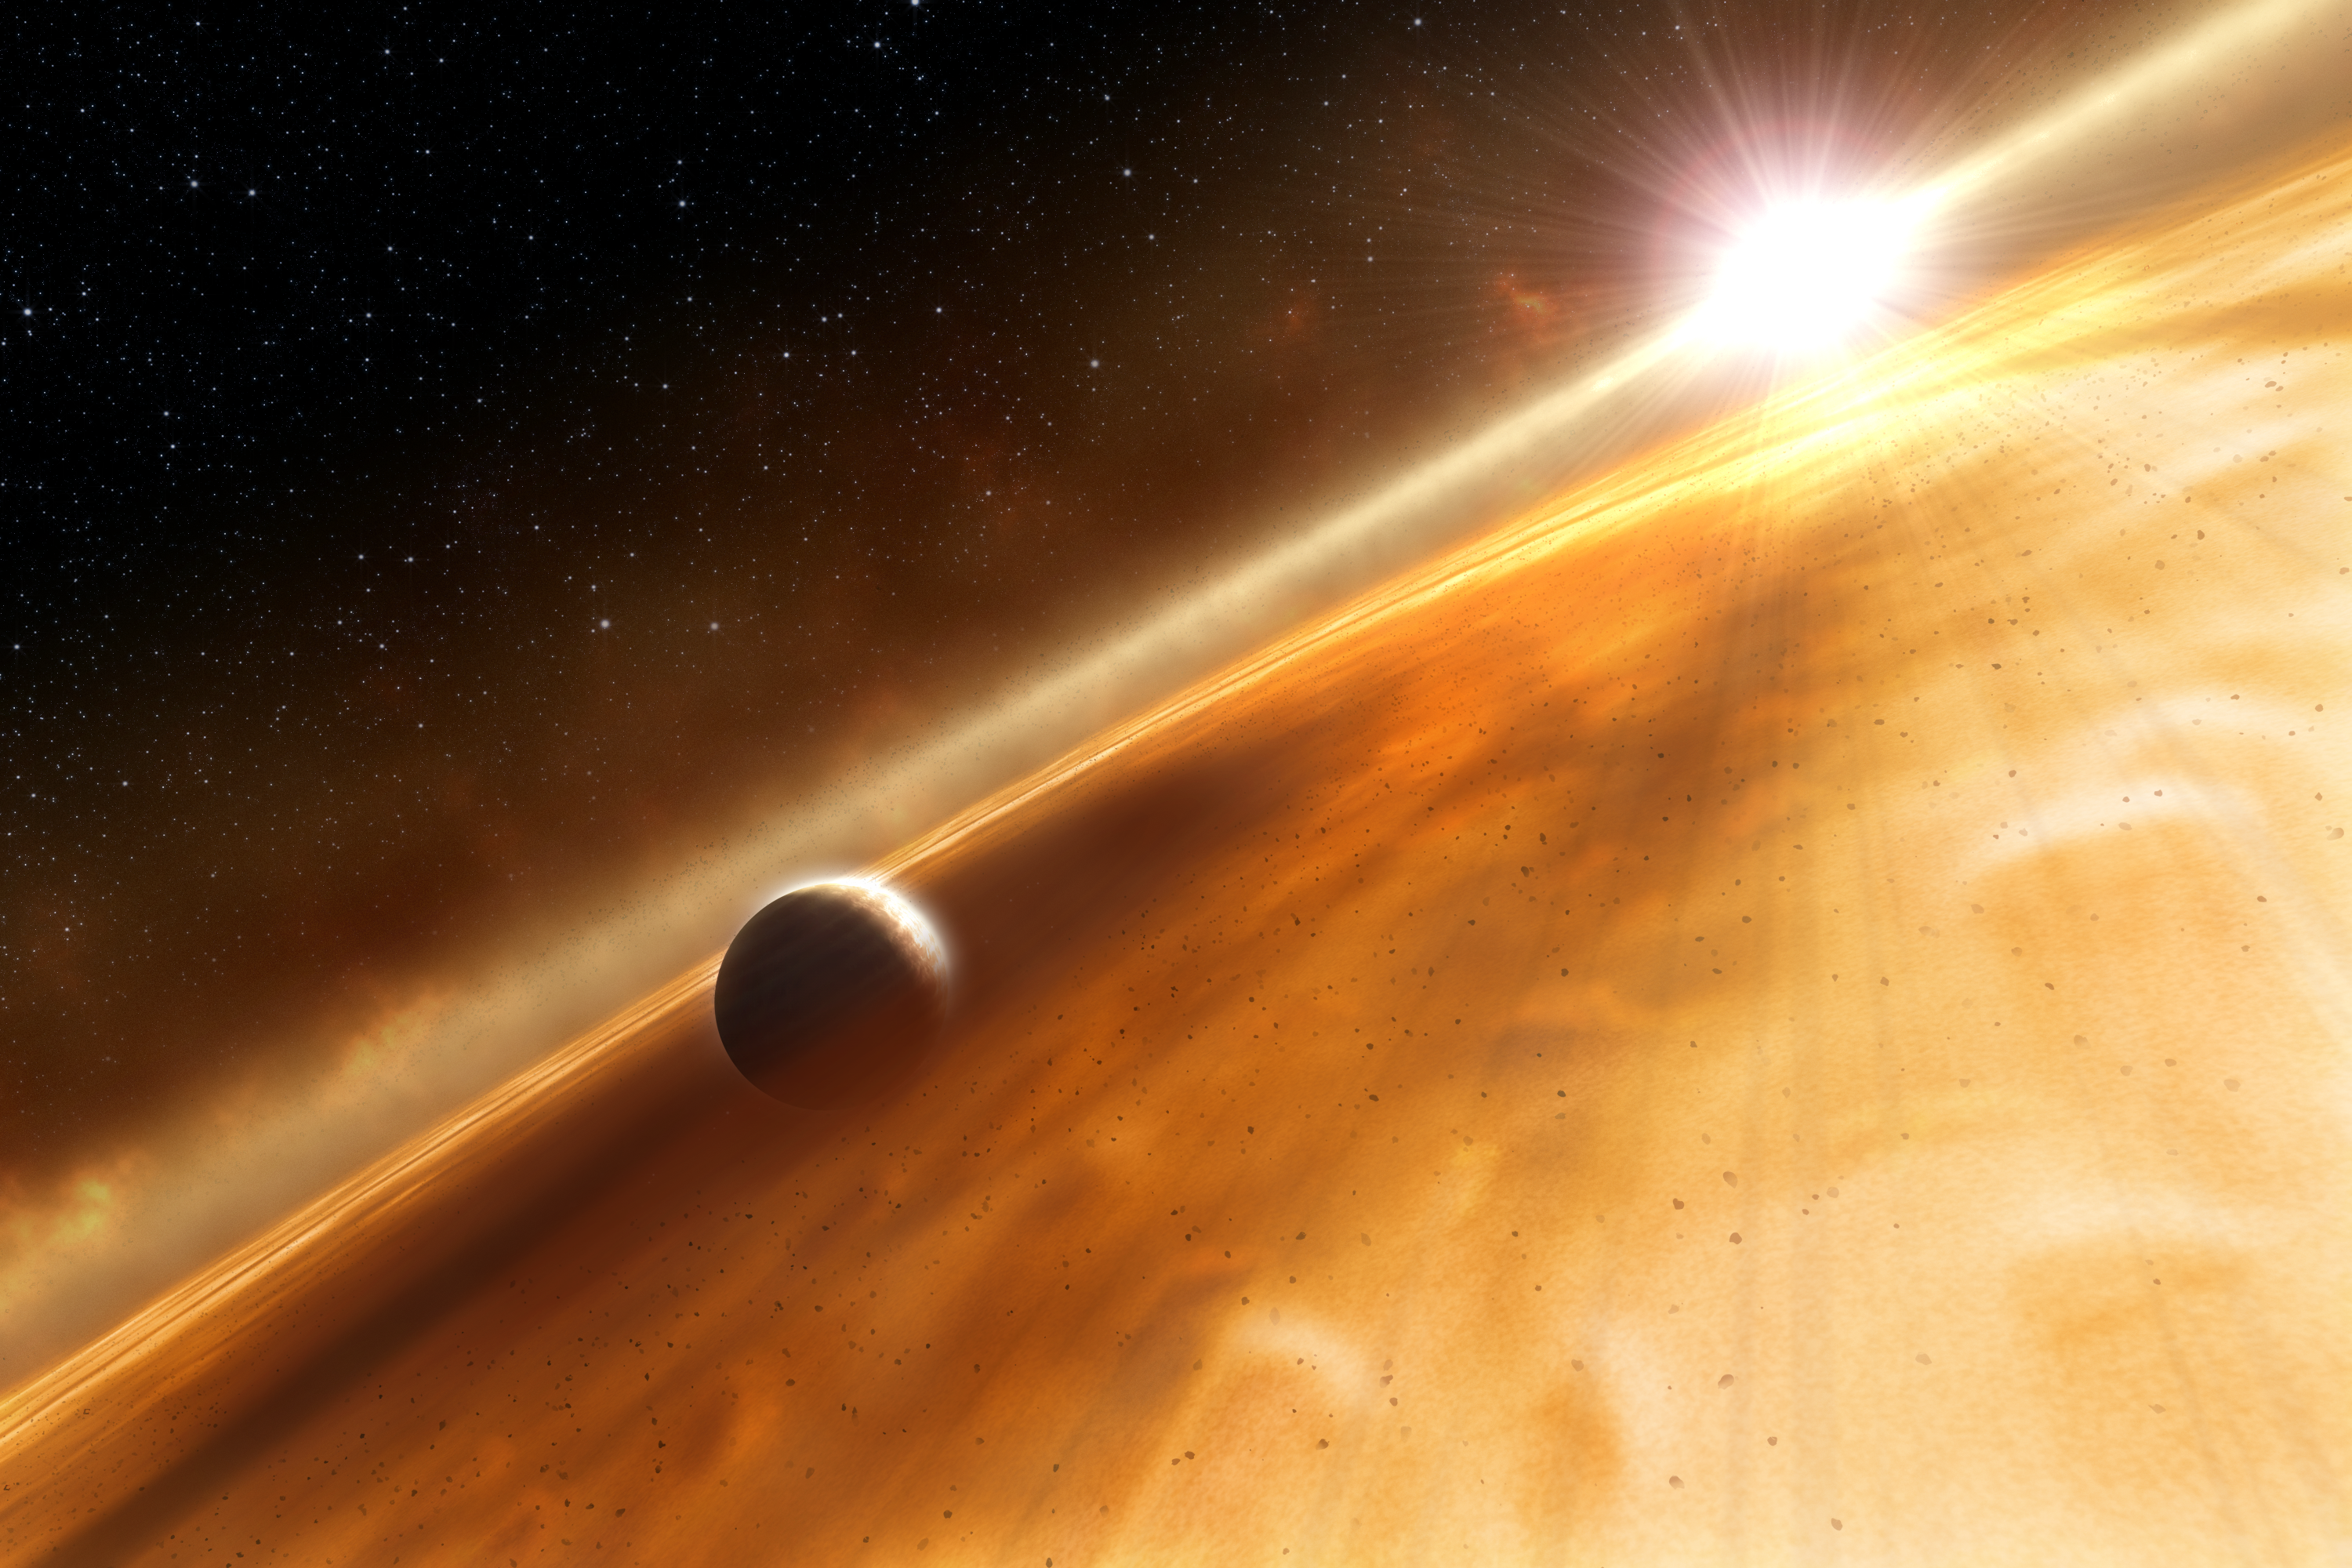

Artist's concept of exoplanet orbiting Fomalhaut

This illustration shows the newly discovered planet, Fomalhaut b, orbiting its sun, Fomalhaut.

This structure is a Saturn-like ring that astronomers say may encircle the planet. Fomalhaut also is surrounded by a ring of material. The edge of this vast disk is shown in the background as the curving cloud-like feature that appears to intersect the 200-million year-old star. Fomalhaut b lies three billion kilometres inside the disk's inner edge. The planet completes an orbit around Fomalhaut every 872 years.

Credit: ESA, NASA and L. Calçada (ESO)